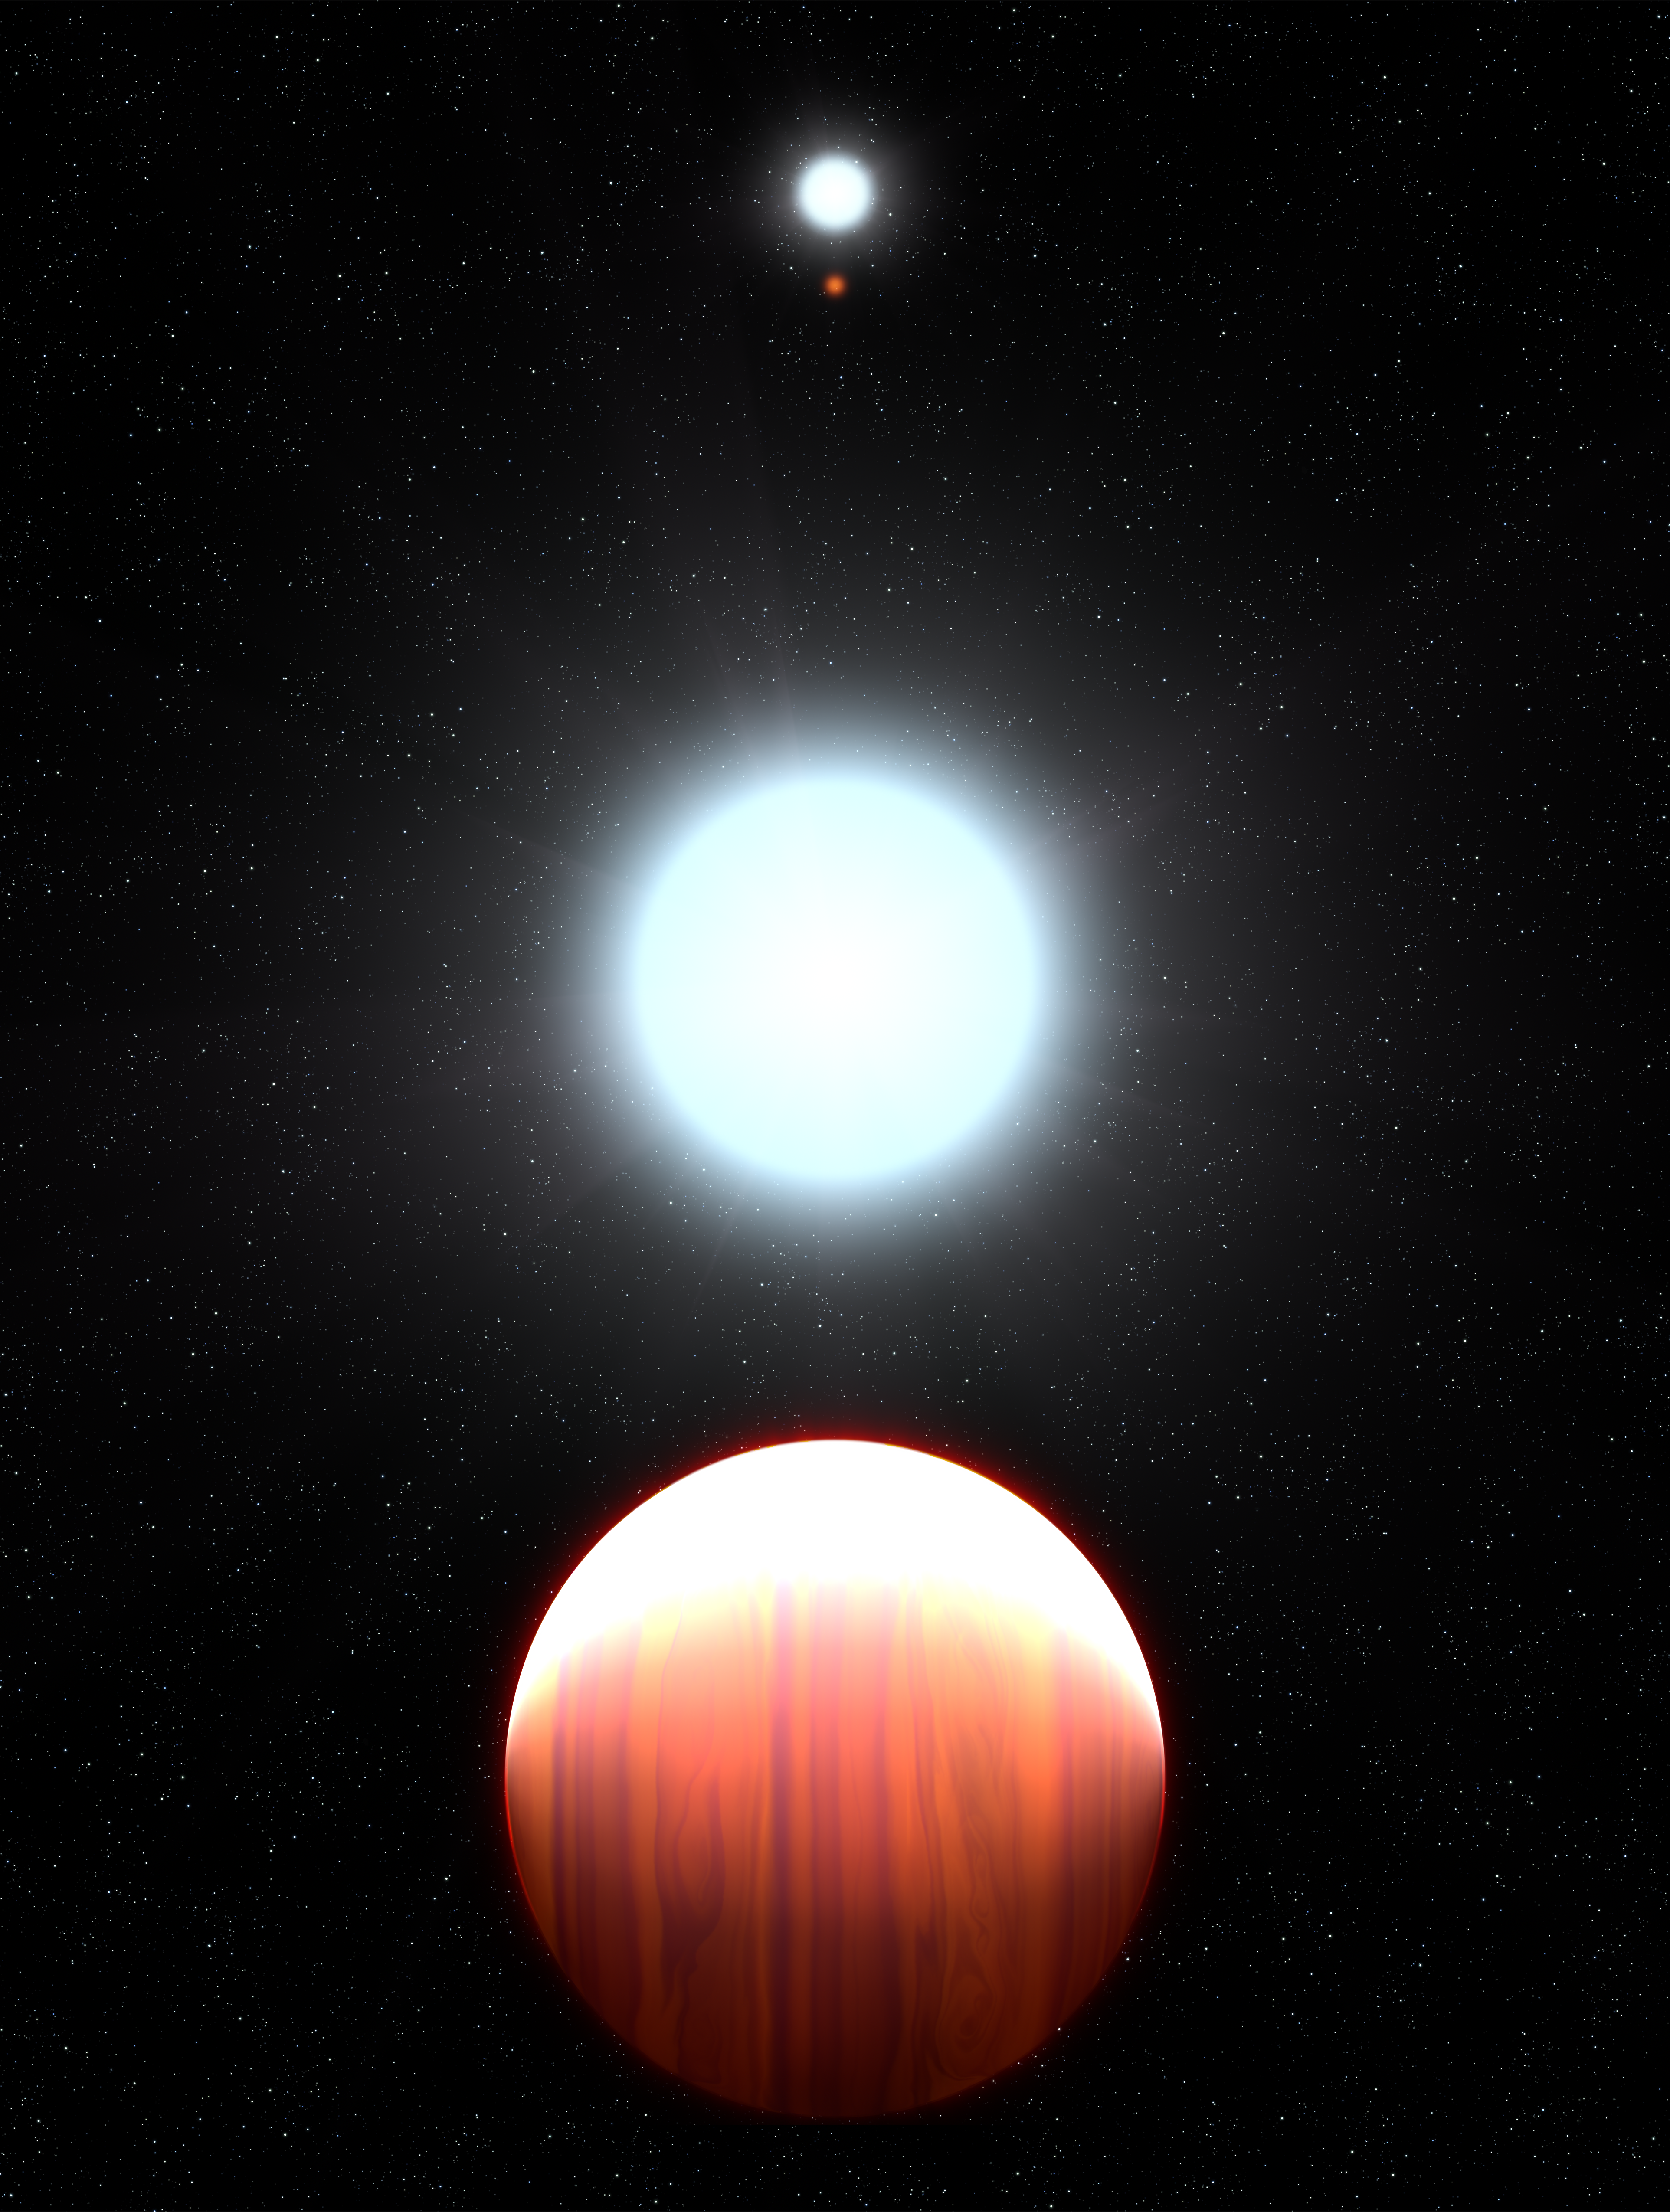

Kepler-13Ab (artist’s impression)

This artist’s impression shows the seething hot planet Kepler-13Ab that circles very close to its host star, Kepler-13A. Seen in the background is the star's binary companion, Kepler-13B, and the third member of the multiple-star system is the orange dwarf star Kepler-13C.

The exoplanet is classified as a hot Jupiter but is actually six times more massive than Jupiter. Unlike chilly Jupiter, this exoplanet is one of the hottest known of the hot Jupiters, with a dayside temperature of more than 2700 °C. Another difference between Jupiter and Kepler-13Ab is that the exoplanet is so close to its star that it is tidally locked. One side keeps a permanent face to the star, and the other side is perpetually dark.

On the nighttime side the planet's immense gravity pulls down titanium oxide and precipitates as snow. Observations of the planet's atmospheric temperature profile made with the NASA/ESA Hubble Space Telescope represent the first time astronomers have detected this precipitation process, called a "cold trap," on an exoplanet. Without titanium oxide to absorb incoming starlight on the daytime side, the atmospheric temperature grows colder with increasing altitude. Normally, titanium oxide in the atmospheres of hot Jupiters absorbs light and reradiates it as heat, making the atmosphere grow warmer at higher altitudes. The Kepler-13 system is 1730 light-years from Earth.

The research teams consists of Thomas Beatty, Ming Zhao, Jason Wright, and Ronald Gilliland (Pennsylvania State University, University Park), Nikku Madhusudhan (University of Cambridge, U.K.), Angelos Tsiaras (University College London, U.K.), and Avi Shporer and Heather Knutson (California Institute of Technology, Pasadena, California).

Credit: NASA, ESA, and G. Bacon (STScI)